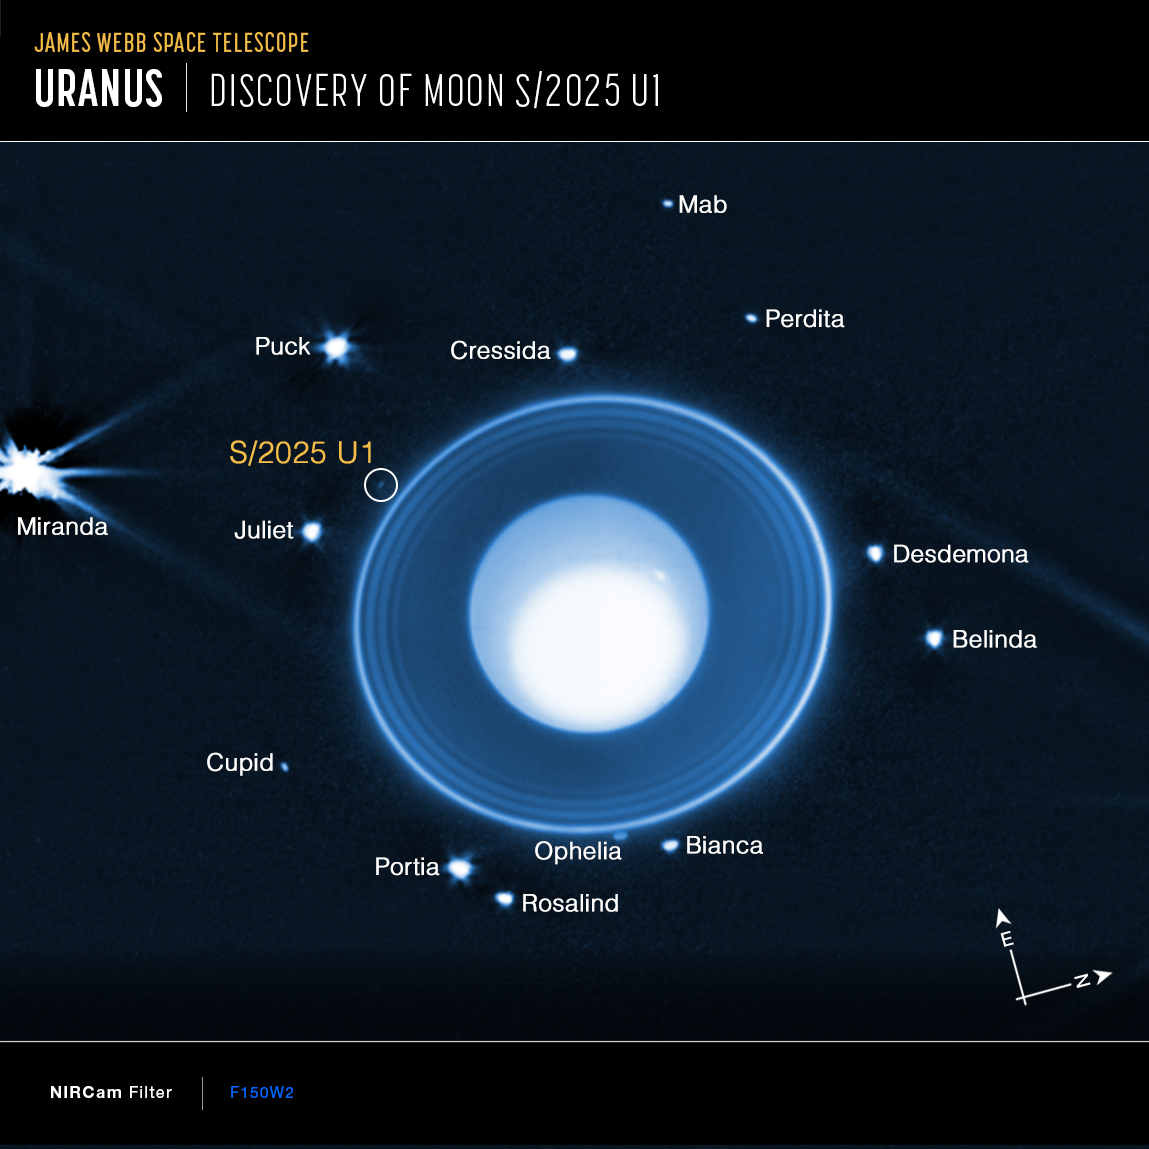

New moon of Uranus

Astronomers using the NASA/ESA/CSA James Webb Space Telescope discovered a new moon orbiting Uranus in images taken by Webb’s NIRCam (Near-Infrared Camera). This image shows the moon, designated S/2025 U1, as well as 13 of the 28 other known moons orbiting the planet. The small moon Cordelia orbits just inside the outermost ring, but is not visible in these views due to glare from the rings.

Due to the drastic differences in brightness levels, the image is a composite of three different treatments of the data, allowing the viewer to see details in the planetary atmosphere, the surrounding rings, and the orbiting moons. The data was taken with NIRCam’s wide band F150W2 filter that transmits infrared wavelengths from about 1.0 to 2.4 microns.

Credit: NASA, ESA, CSA, STScI, M. El Moutamid (SWRI), M. Hedman (University of Idaho)